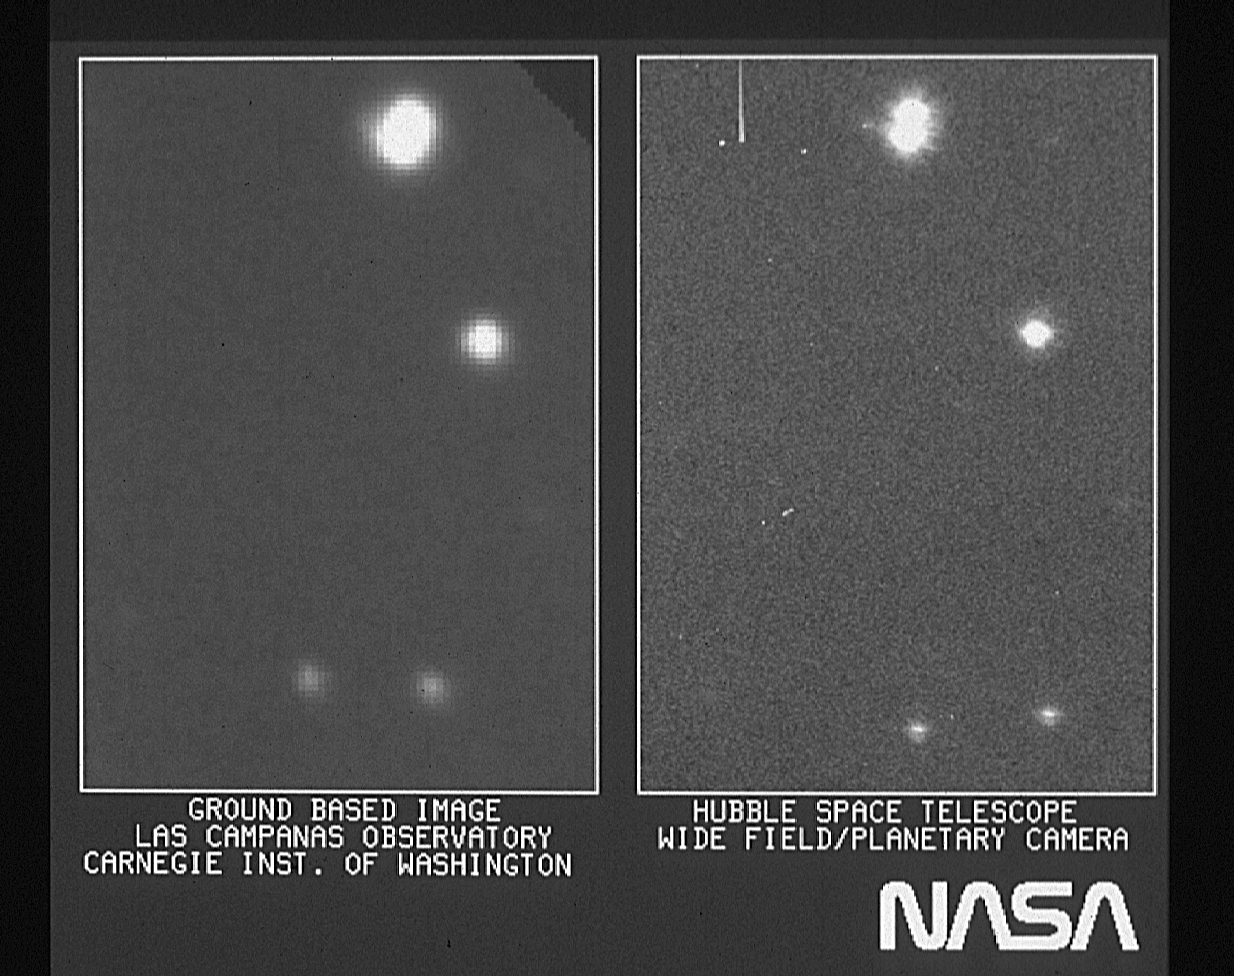

HST WC/PC first light image

On the right is part of the first image taken with NASA/ESA Hubble Space Telescope's (HST) Wide Field Planetary Camera. It is shown with a ground-based picture from Las Campanas, Chile, Observatory of the same region of the sky. The Las Campanas picture was taken with a 100-inch telescope and its typical of high quality pictures obtained from the ground. All objects seen are stars within the Milky Way galaxy.

The images of the stars in the ground-based picture are fuzzy and in some cases are overlapping, because of smearing by the Earth's atmosphere. The same stars in the HST frame are sharper and well resolved, as shown by the double star at the top of the image. By avoiding the Earth's atmosphere, the HST gives sharper images and better resolution. In this early engineering picture, the HST images are roughly 50 percent sharper than the ground-based images.

Credit: NASA/ESA